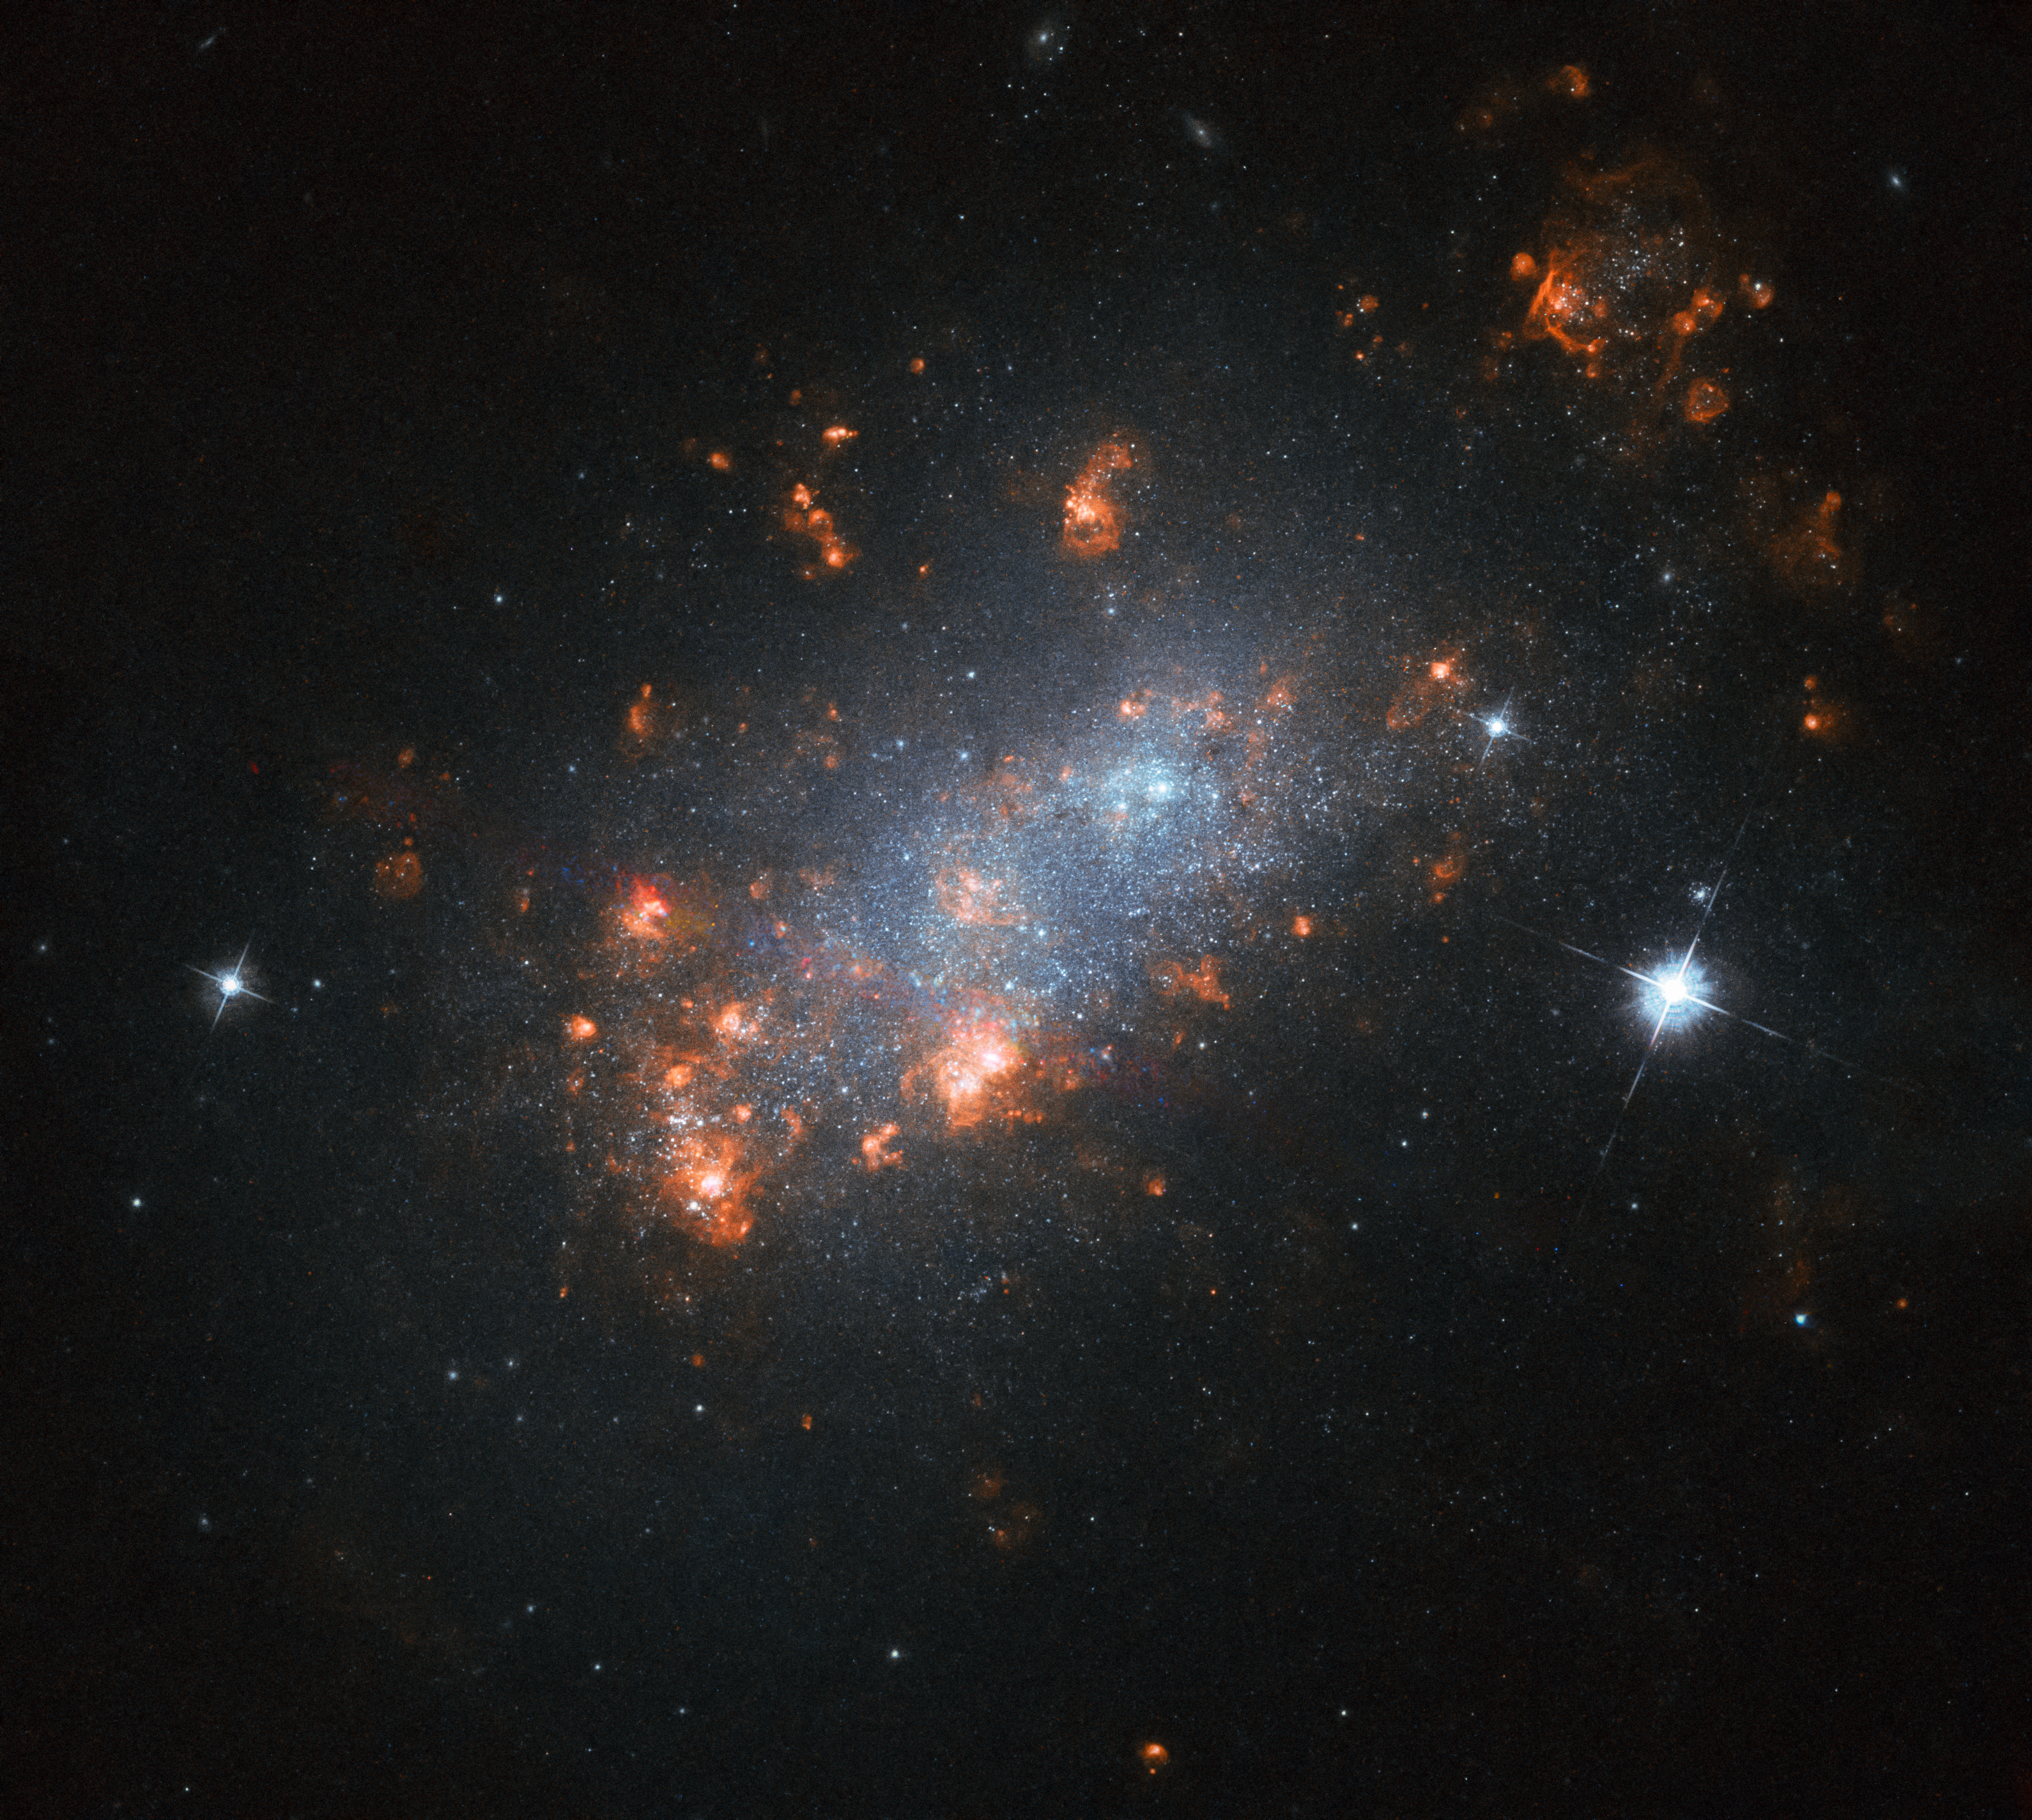

Galactic Cherry Blossom

The galaxy NGC 1156 resembles a delicate cherry blossom tree flowering in springtime in this Hubble Picture of the Week. The many bright "blooms" within the galaxy are in fact stellar nurseries — regions where new stars are springing to life. Energetic light emitted by newborn stars in these regions streams outwards and encounters nearby pockets of hydrogen gas, causing it to glow with a characteristic pink hue.

NGC 1156 is located in the constellation of Aries (The Ram). It is classified as a dwarf irregular galaxy, meaning that it lacks a clear spiral or rounded shape, as other galaxies have, and is on the smaller side, albeit with a relatively large central region that is more densely packed with stars.

Some pockets of gas within NGC 1156 rotate in the opposite direction to the rest of the galaxy, suggesting that there has been a close encounter with another galaxy in NGC 1156's past. The gravity of this other galaxy — and the turbulent chaos of such an interaction — could have scrambled the likely more orderly rotation of material within NGC 1156, producing the odd behaviour we see today.

Credit: ESA/Hubble, NASA, R. Jansen